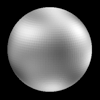

The Surface of Pluto

This image is from a global map constructed through computer image processing performed on the Hubble data. The tile pattern is an artifact of the image enhancement technique.

Credit: Alan Stern (Southwest Research Institute), Marc Buie (Lowell Observatory), NASA and ESA